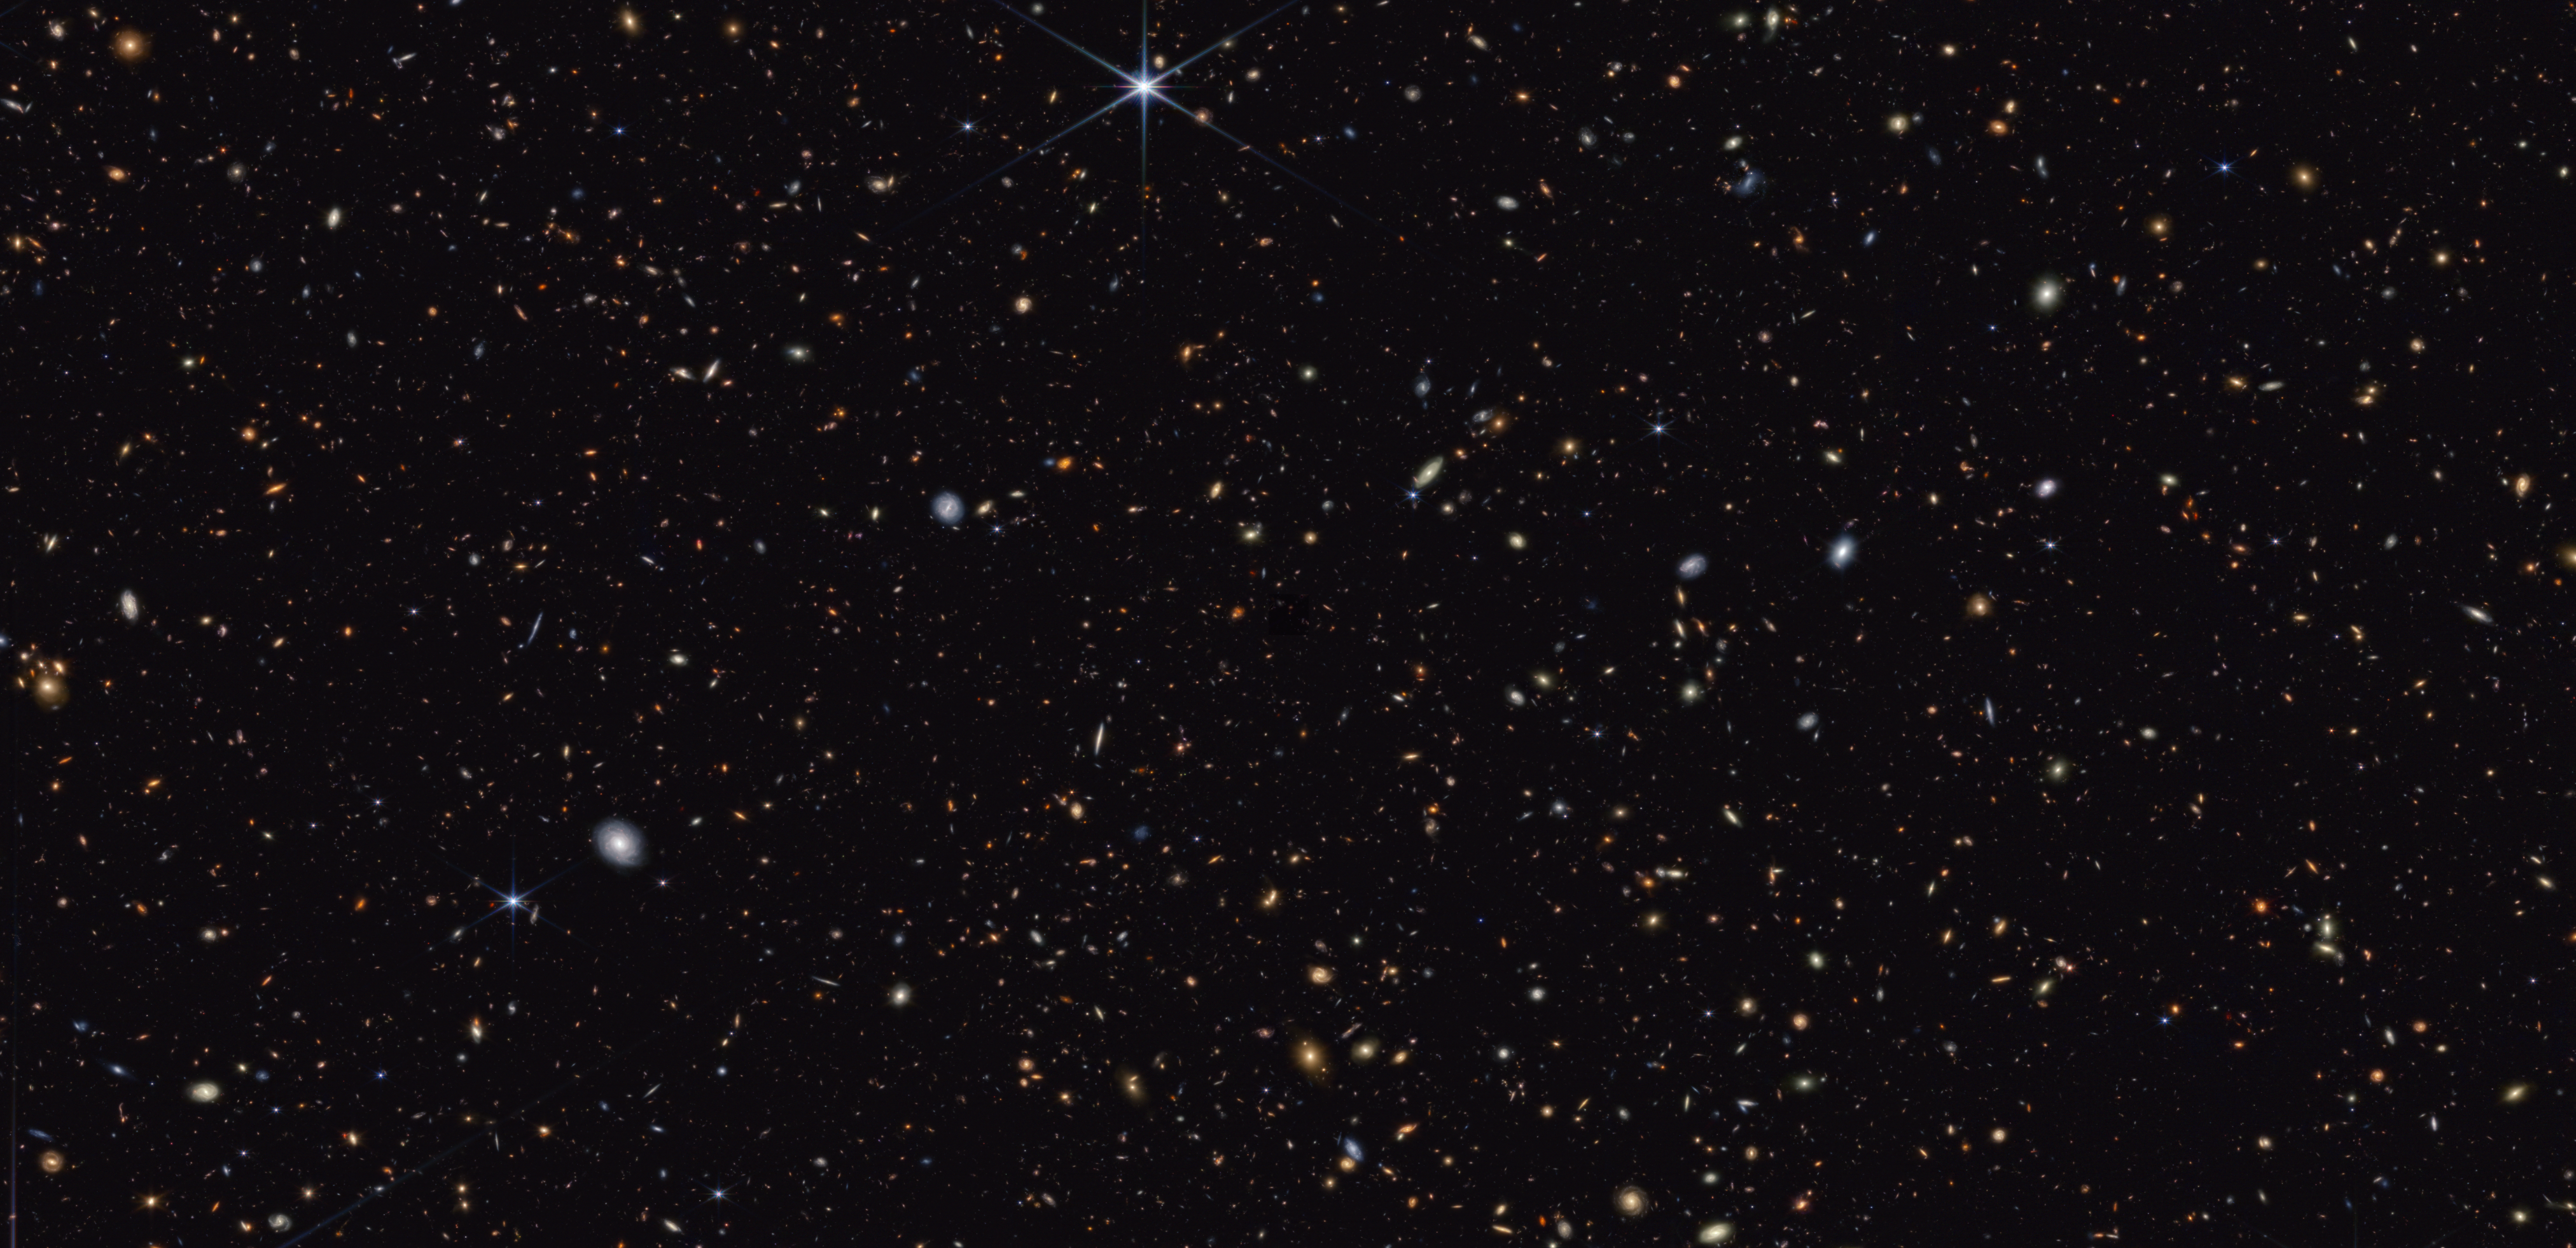

GOODS-North field (clean)

This image from Webb’s NIRCam (Near-Infrared Camera) instrument shows a portion of the GOODS-North field of galaxies.

Credit: NASA, ESA, CSA, B. Robertson (UC Santa Cruz), B. Johnson (CfA), S. Tacchella (Cambridge), M. Rieke (University of Arizona), D. Eisenstein (CfA)